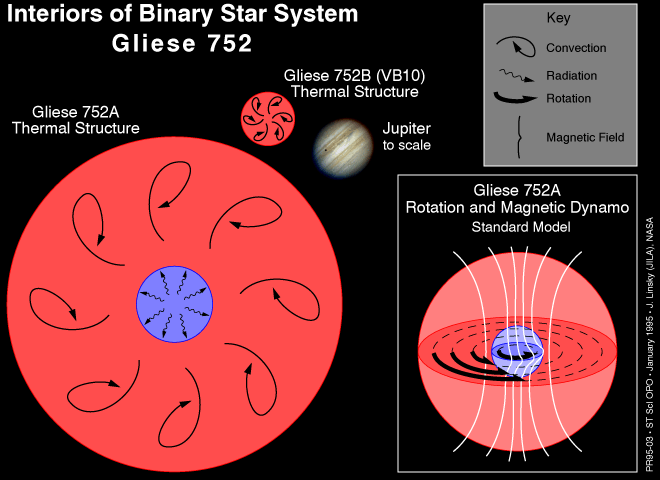

Interiors of binary star system Gliese 752

The Hubble Space Telescope has uncovered surprising evidence that powerful magnetic fields might exist around the lowest mass stars in the universe, which are near the threshold of stellar burning processes.

Credit: Ray Villard/STScI, Dr. Jeffrey Linsky/JILA